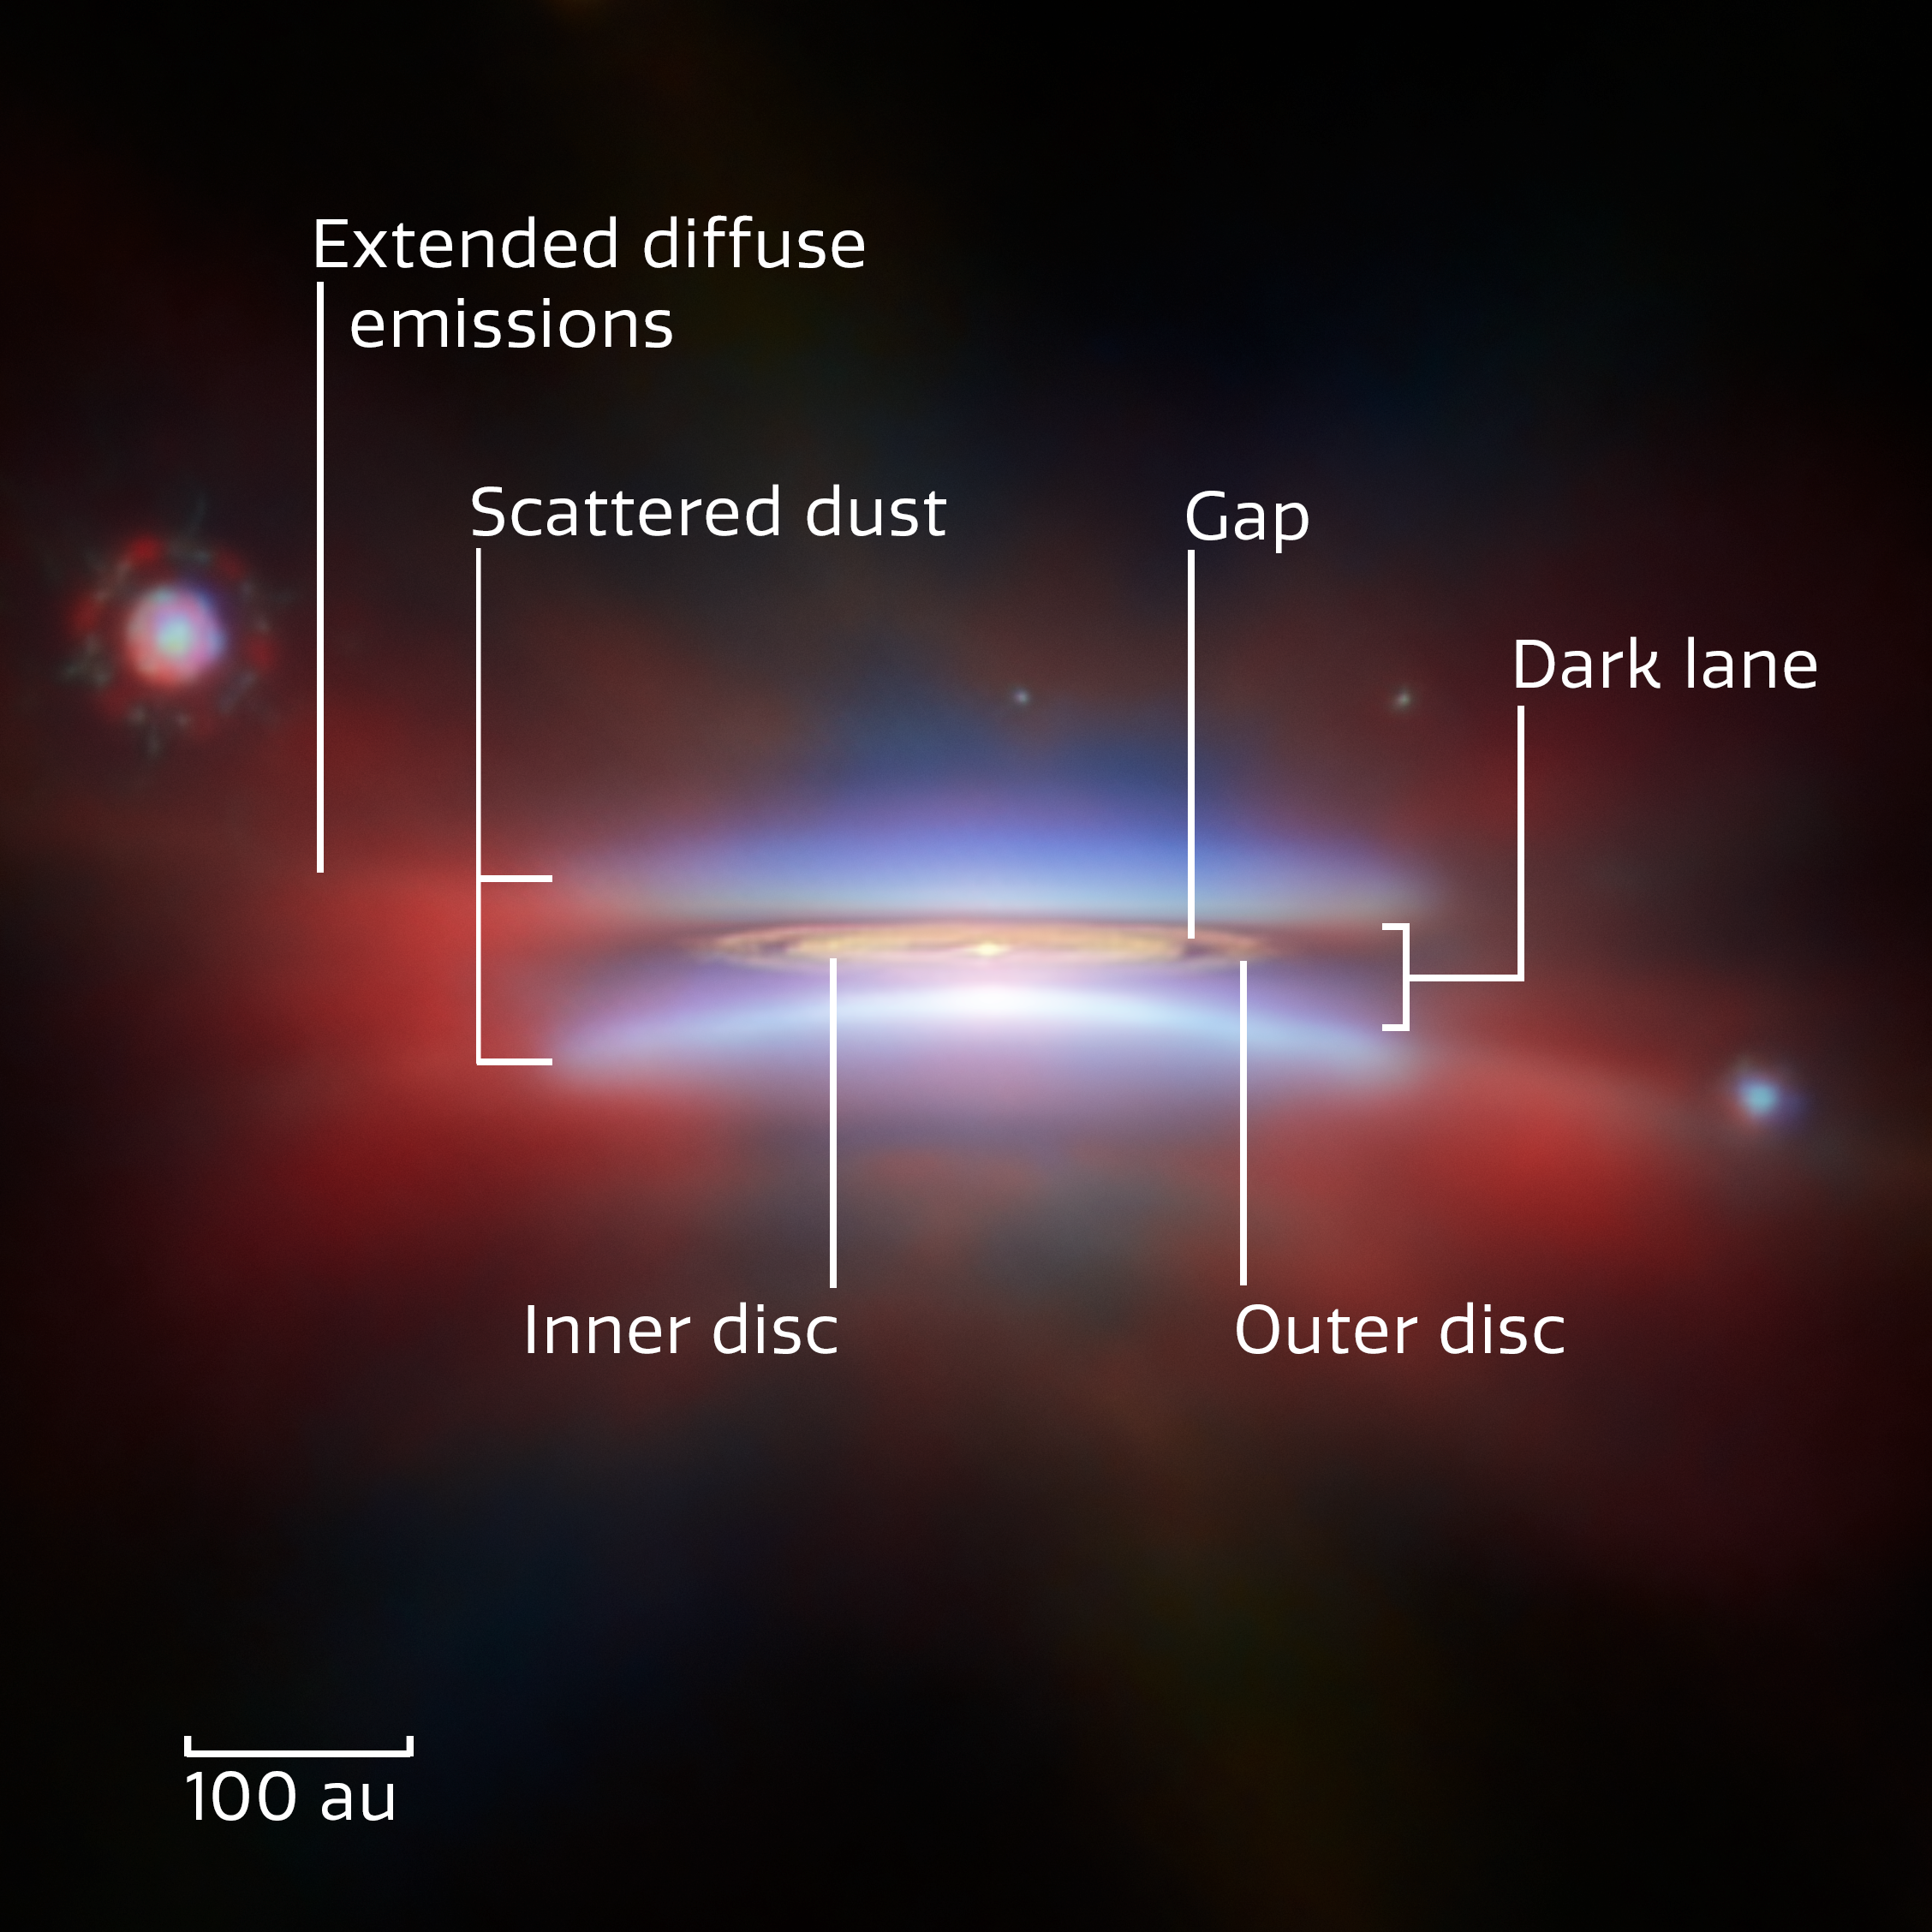

Oph 163131 (annotated close-up)

This shining disc is named Oph 163131, and it’s one of two protoplanetary discs featured for this month's ESA/Webb Picture of the Month. Also catalogued as 2MASS J16313124-2426281, it is located about 480 light-years away in our galaxy, in the constellation Ophiuchus. Its close location, almost edge-on inclination of 85 degrees (where 90 would be perfectly edge-on) and its considerable size of 66 billion kilometres across — several times wider than our Solar System — make it an excellent target for studying these kinds of planet-forming discs.

At the centre of Oph 163131 is a newly formed star that’s still wrapped in a thick disc of gas and dust. Eventually the new star will disperse all the dust with its ferocious radiation, but before that happens there’s a chance for the dust to clump together and grow into pebbles, planetesimals and eventually planets — hence, a protoplanetary disc. Whether planets appear, and what kind of planets they are, depends on how larger and smaller dust grains migrate in the disc. An edge-on view like this shows us if dust grains are settling into a layer of large dust grains at the core of the disc. Such a layer is critical for dust grains to further grow and begin forming planets, and the thicker it is, the better.

This image of Oph 163131 combines near- and mid-infrared data from Webb’s NIRCam and MIRI instruments with visible light captured by the NASA/ESA Hubble Space Telescope and radio waves from the Atacama Large Millimeter/submillimeter Array (ALMA). Where Hubble and Webb each image tiny dust grains only micrometres across, ALMA sees larger dust grains that are about a milimetre in size, which are concentrated in the central plane of the disc. Combined with the very slightly off-edge perspective, this creates a particularly clear picture of the structure of Oph 163131. The annotations on this image describe different features of the disc.

Credit: ESA/Webb, NASA & CSA, ESA/Hubble, ALMA (ESO/NAOJ/NRAO), M. Villenave